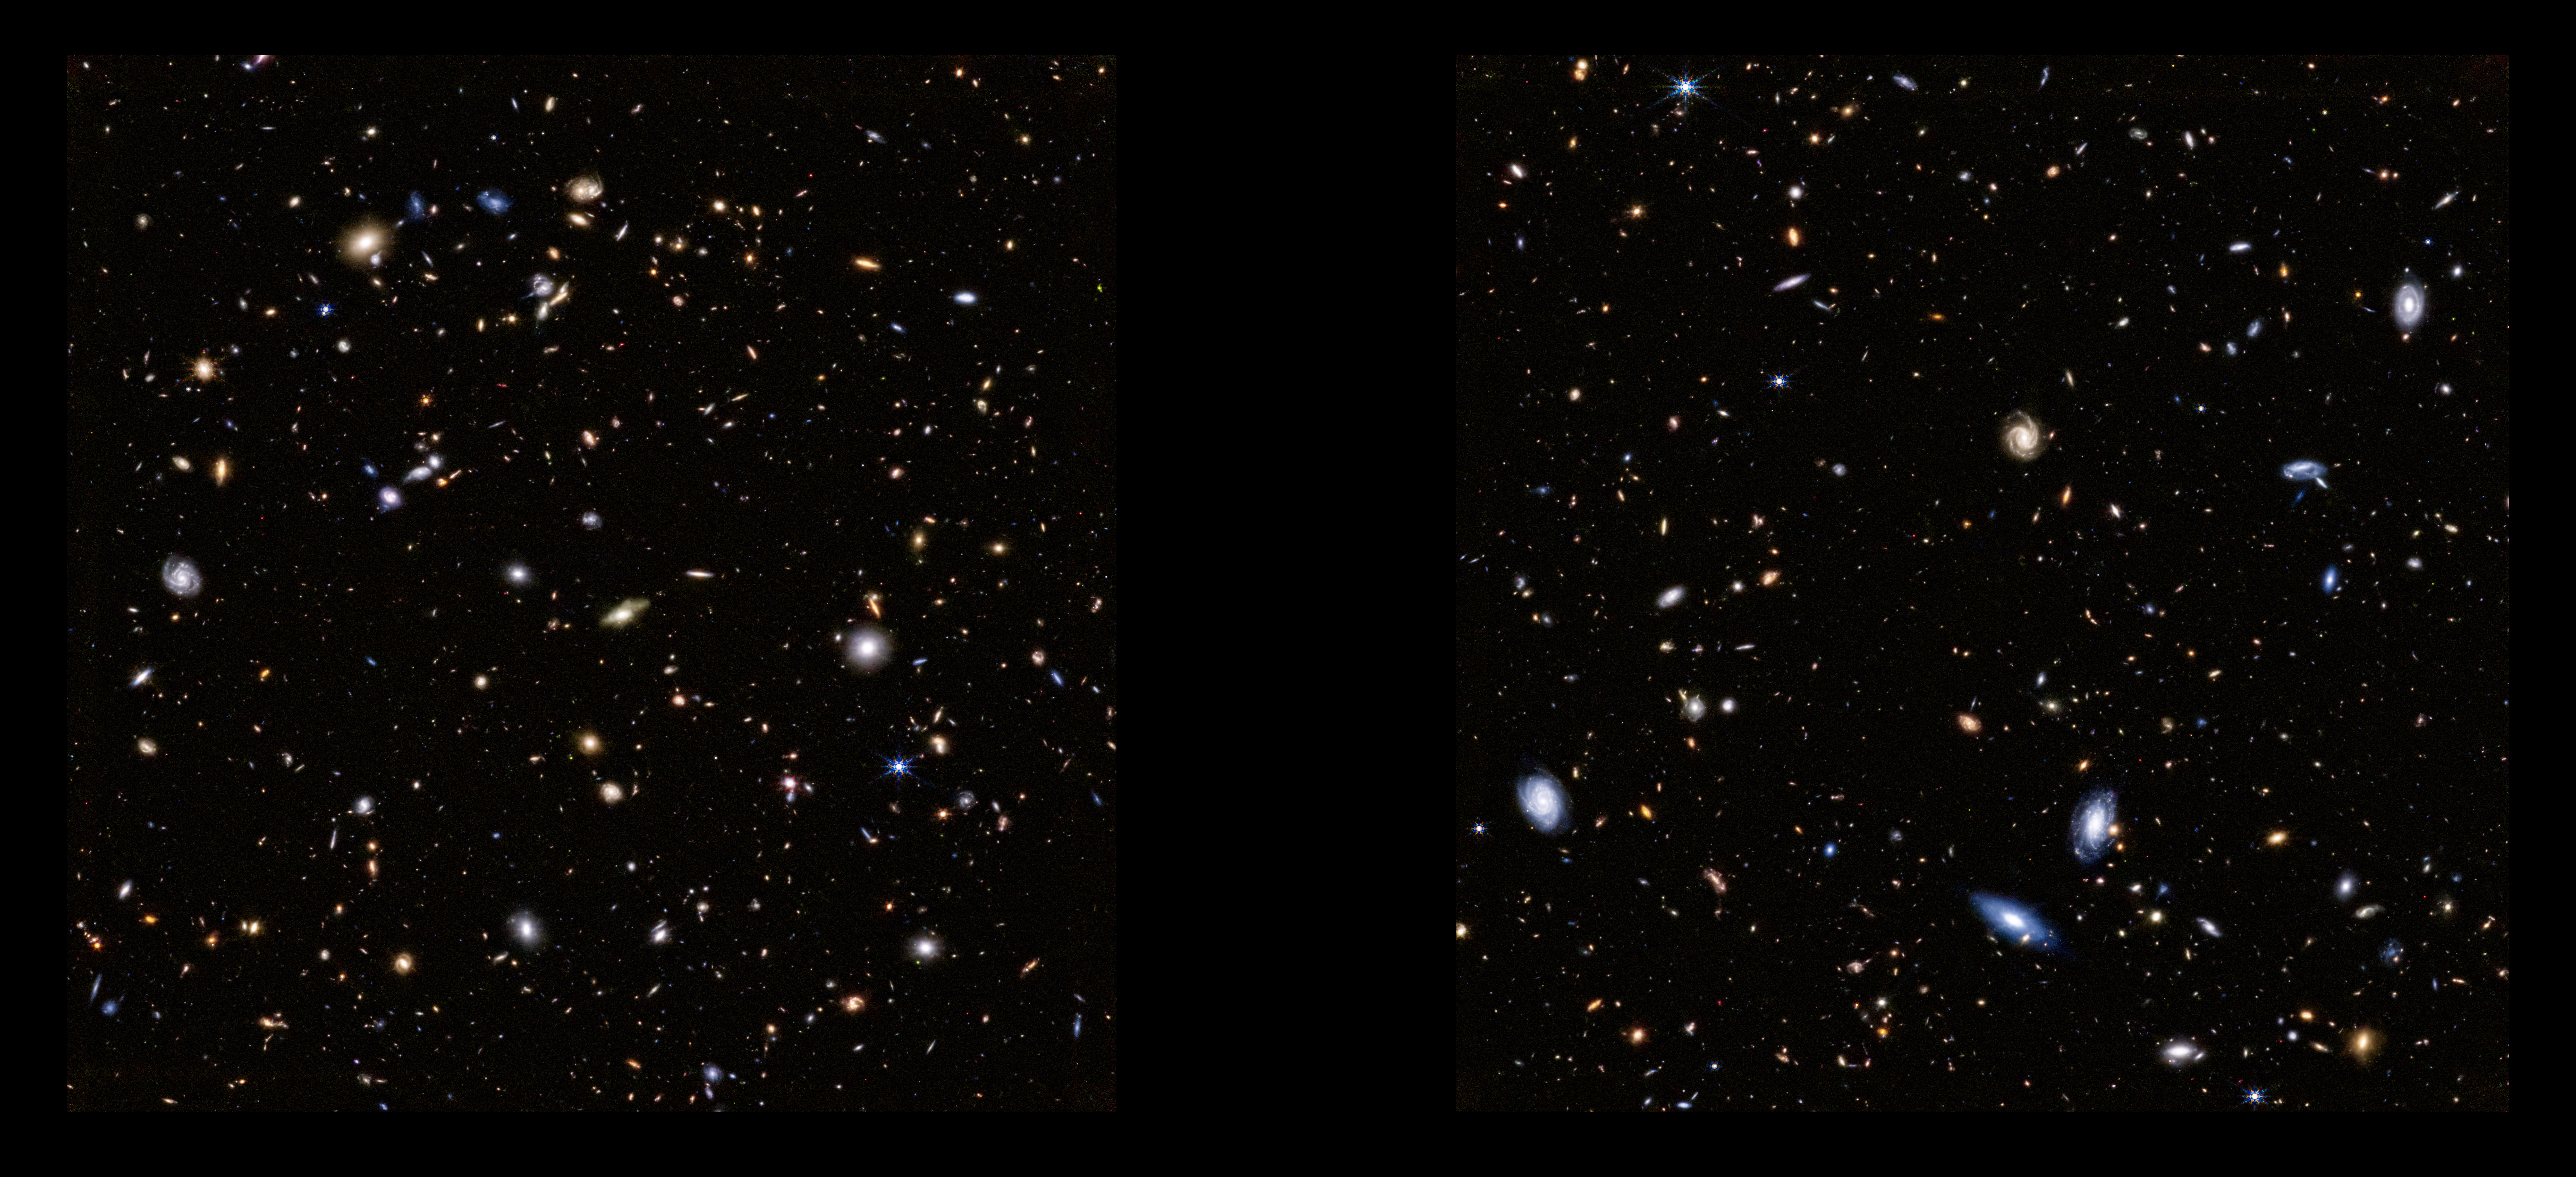

Webb observes the Hubble Ultra Deep Field

On 11 October 2022, the NASA/ESA/CSA James Webb Space Telescope spent over 20 hours observing the long-studied Ultra Deep Field of the NASA/ESA Hubble Space Telescope for the first time. The general observer program (GO 1963) focused on analysing the field in wavelengths between approximately 2 and 4 microns. This image was taken by the Near Infrared Camera (NIRCam).

The Webb image observes the field at depths comparable to Hubble – revealing galaxies of similar faintness – in just one-tenth as much observing time. It includes 1.8-micron light shown in blue, 2.1-micron light shown in green, 4.3-micron light shown in yellow, 4.6-micron light shown in orange, and 4.8-micron light shown in red (filters F182M, F210M, F430M, F460M, and F480M).

Note: This post highlights data from Webb science in progress, which has not yet been through the peer-review process.

Credit: NASA, ESA, CSA, J. DePasquale (STScI).